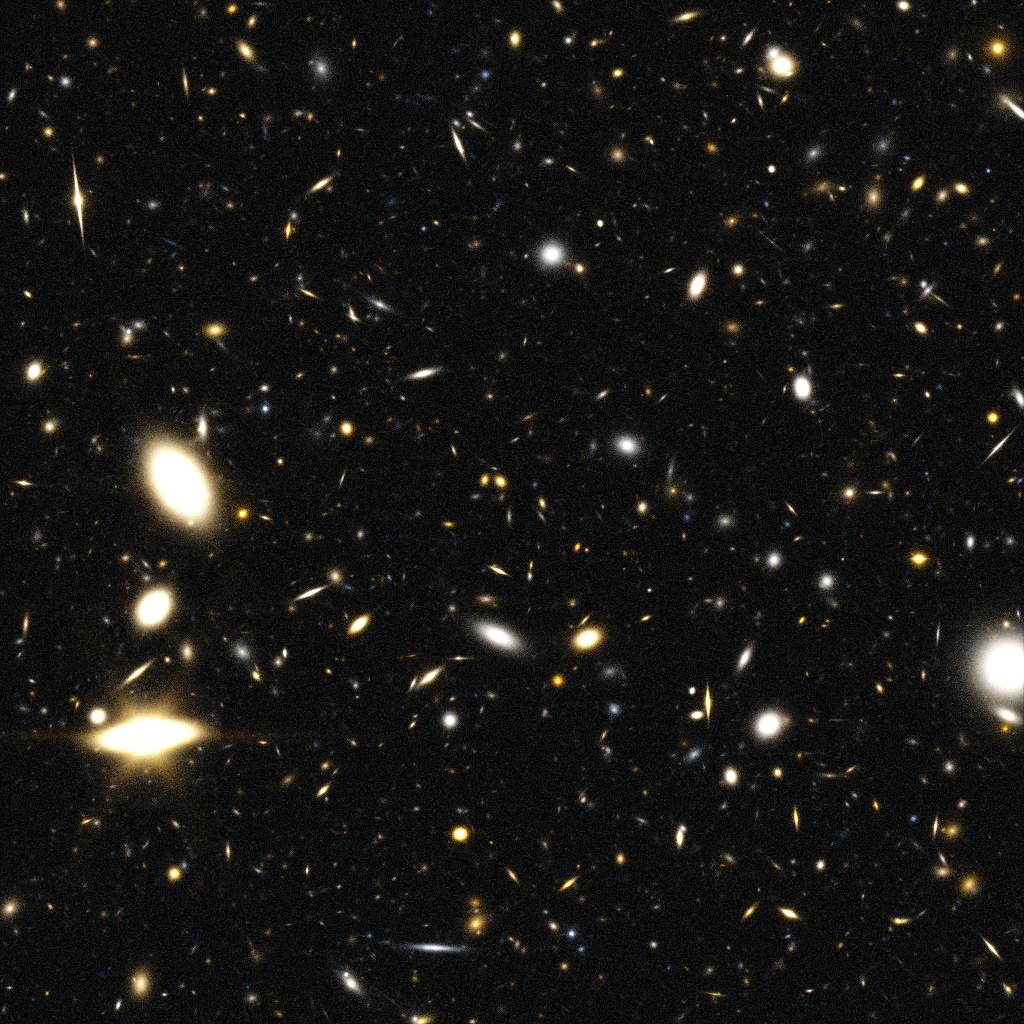

Through the Eyes of JWST (simulation)

This is a simulated view of the far universe as seen through the NASA/ESA James Webb Space Telescope (JWST). The photograph shows a simulated 20-hour observation with NGST of a random patch of the sky, located far from the plane of our Milky Way, that is cluttered with stars.

NASA has selected TRW to build the James Webb Space Telescope (JWST), a successor to the Hubble Space Telescope. This space-based observatoryis called the James Webb Space Telescope, named after James E. Webb, NASA's second administrator. While Webb is best known for leading Apollo and a series of lunar exploration programs that landed the first humans on the Moon, he also initiated a vigorous space science program, responsible for more than 75 launches during his tenure, including America's first interplanetary explorers.

Credit: NASA/ESA, Andrew Benson (University of Durham, United Kingdom), and the JWST Science Team (STScI)